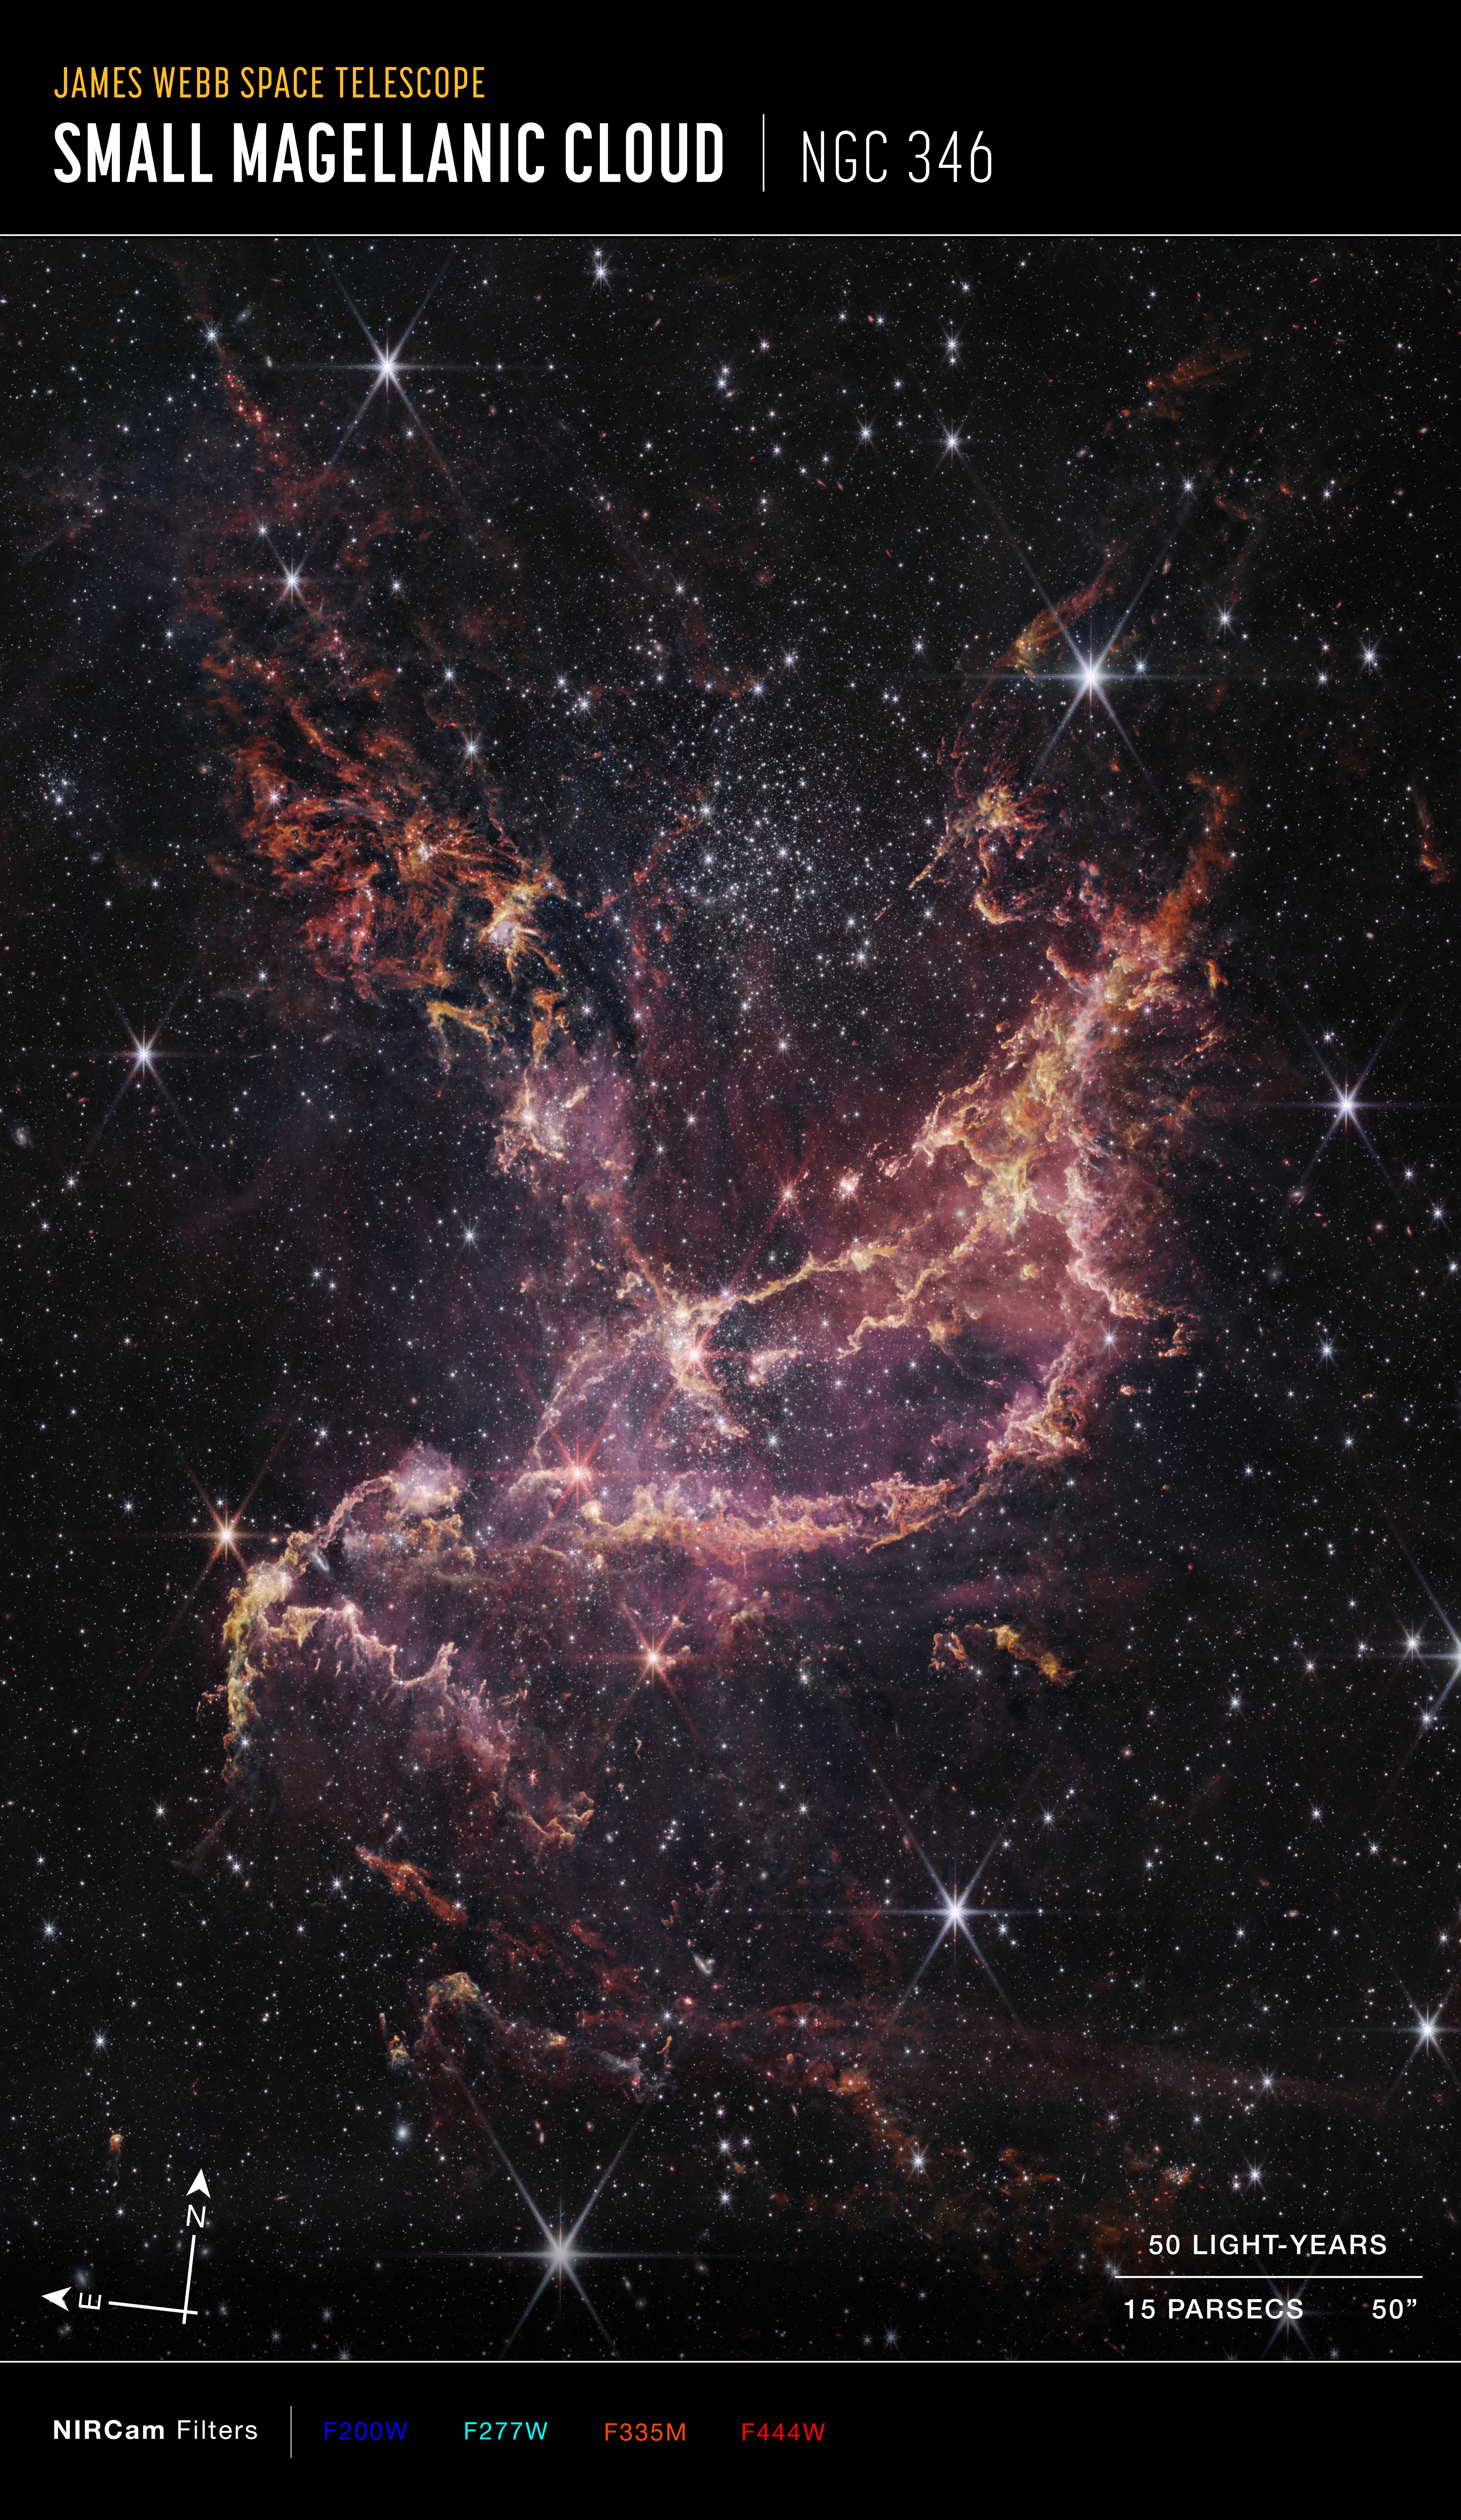

Webb Inspects NGC 346 (Annotated)

This image features NGC 346, one of the most dynamic star-forming regions in nearby galaxies, as seen by the NASA/ESA/CSA James Webb Space Telescope.

NCG 346 is located in the Small Magellanic Cloud (SMC), a dwarf galaxy close to our Milky Way.

Credit: NASA, ESA, CSA, STScI, A Pagan (STScI)